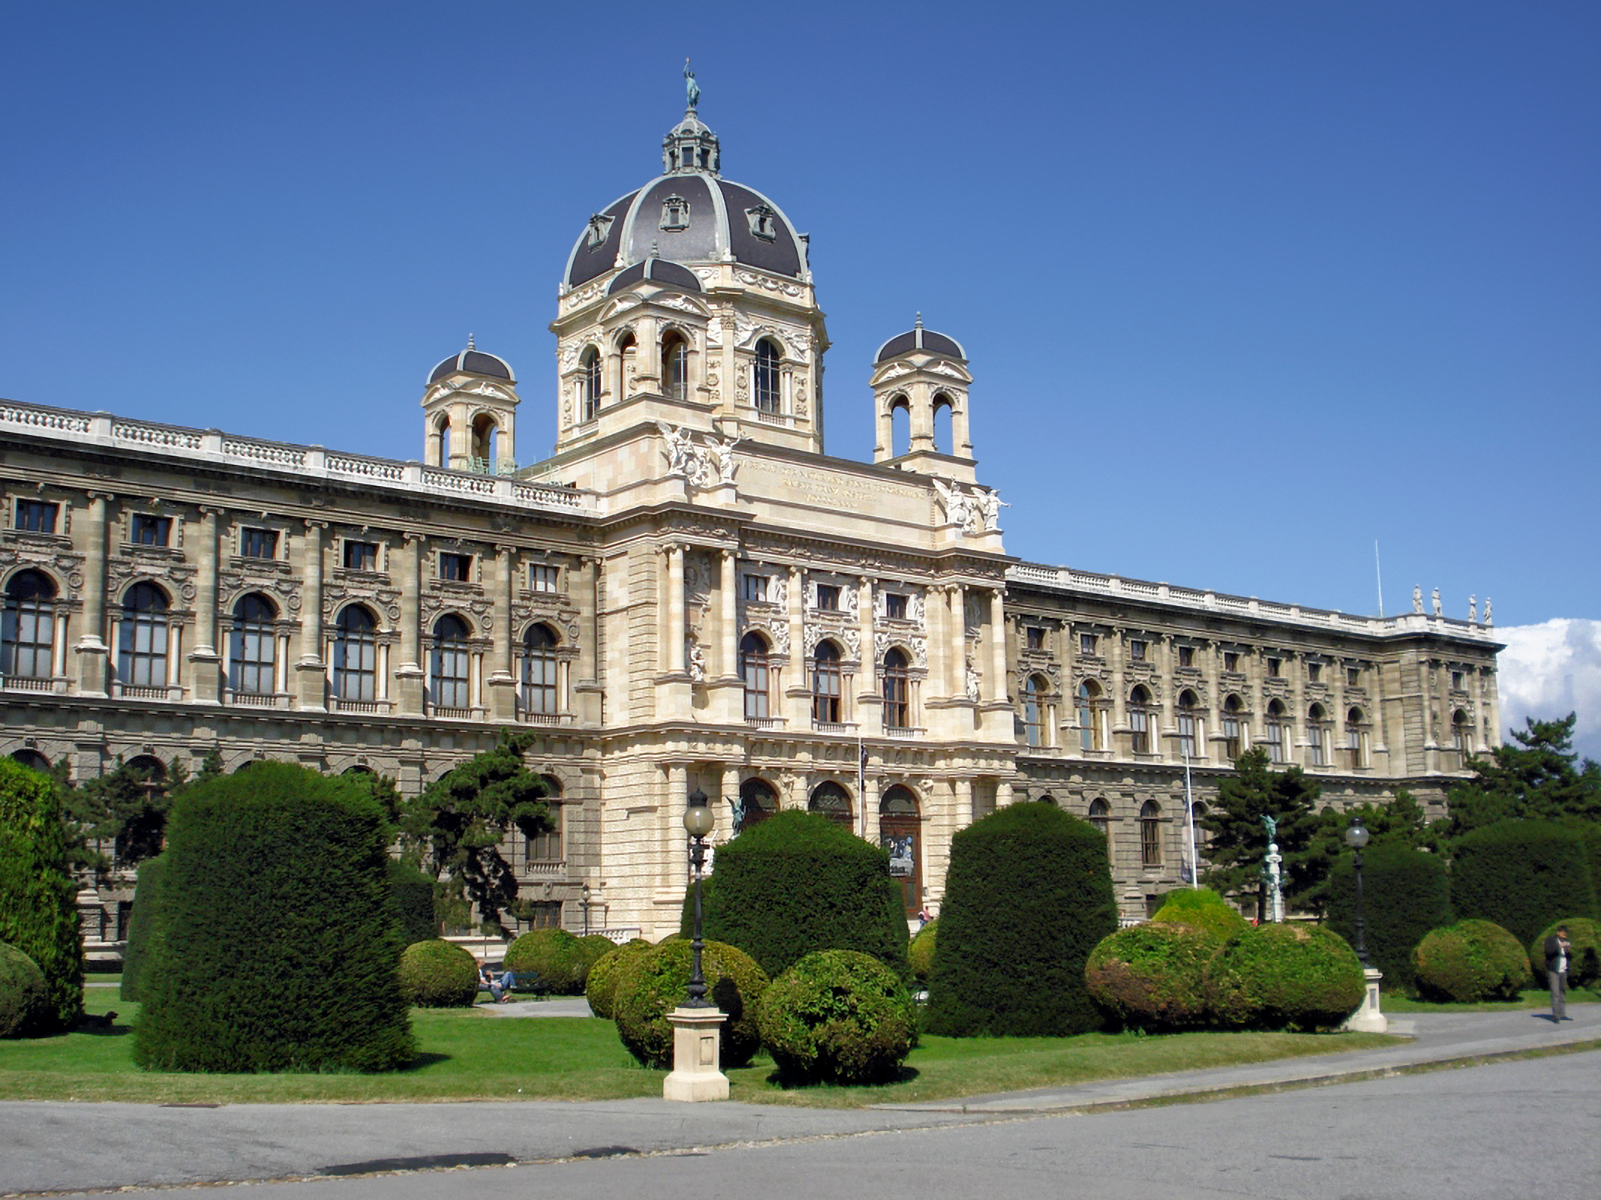

Natural History Museum Vienna

The Natural History Museum Vienna has 30 exhibits on display and is among the most important museums on natural sciences in the world.

Credit: P. Diem